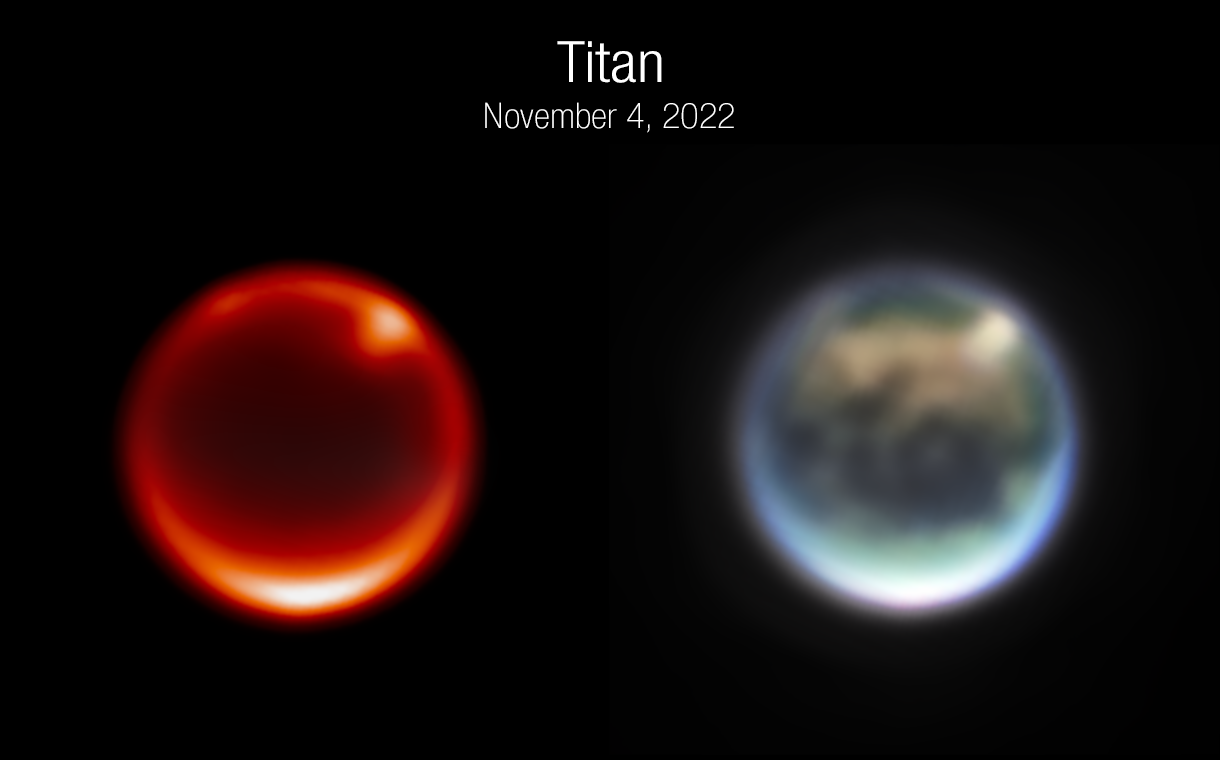

Webb Tracks Clouds on Saturn’s Moon Titan (Clean)

These are images of Saturn’s moon Titan, captured by the NASA/ESA/CSA James Webb Space Telescope’s NIRCam instrument on 4 November 2022. The image on the left uses a filter sensitive to Titan’s lower atmosphere. The bright spots are prominent clouds in the northern hemisphere. The image on the right is a color composite image.

Titan is the only moon in the Solar System with a dense atmosphere, and it is also the only planetary body other than Earth that currently has rivers, lakes, and seas. Unlike Earth, however, the liquid on Titan’s surface is composed of hydrocarbons including methane and ethane, not water. Its atmosphere is filled with thick haze that obscures visible light reflecting off the surface.

Scientists have waited for years to use Webb’s infrared vision to study Titan’s atmosphere, including its fascinating weather patterns and gaseous composition, and also see through the haze to study albedo features (bright and dark patches) on the surface. Further Titan data are expected from NIRCam and NIRSpec as well as the first data from Webb’s Mid-Infrared Instrument (MIRI) in May or June of 2023. The MIRI data will reveal an even greater part of Titan’s spectrum, including some wavelengths that have never before been seen. This will give scientists information about the complex gases in Titan’s atmosphere, as well as crucial clues to deciphering why Titan is the only moon in the Solar System with a dense atmosphere.

Note: This post highlights data from Webb science in progress, which has not yet been through the peer-review process.

Credit: NASA, ESA, CSA, A. Pagan (STScI), JWST Titan GTO Team